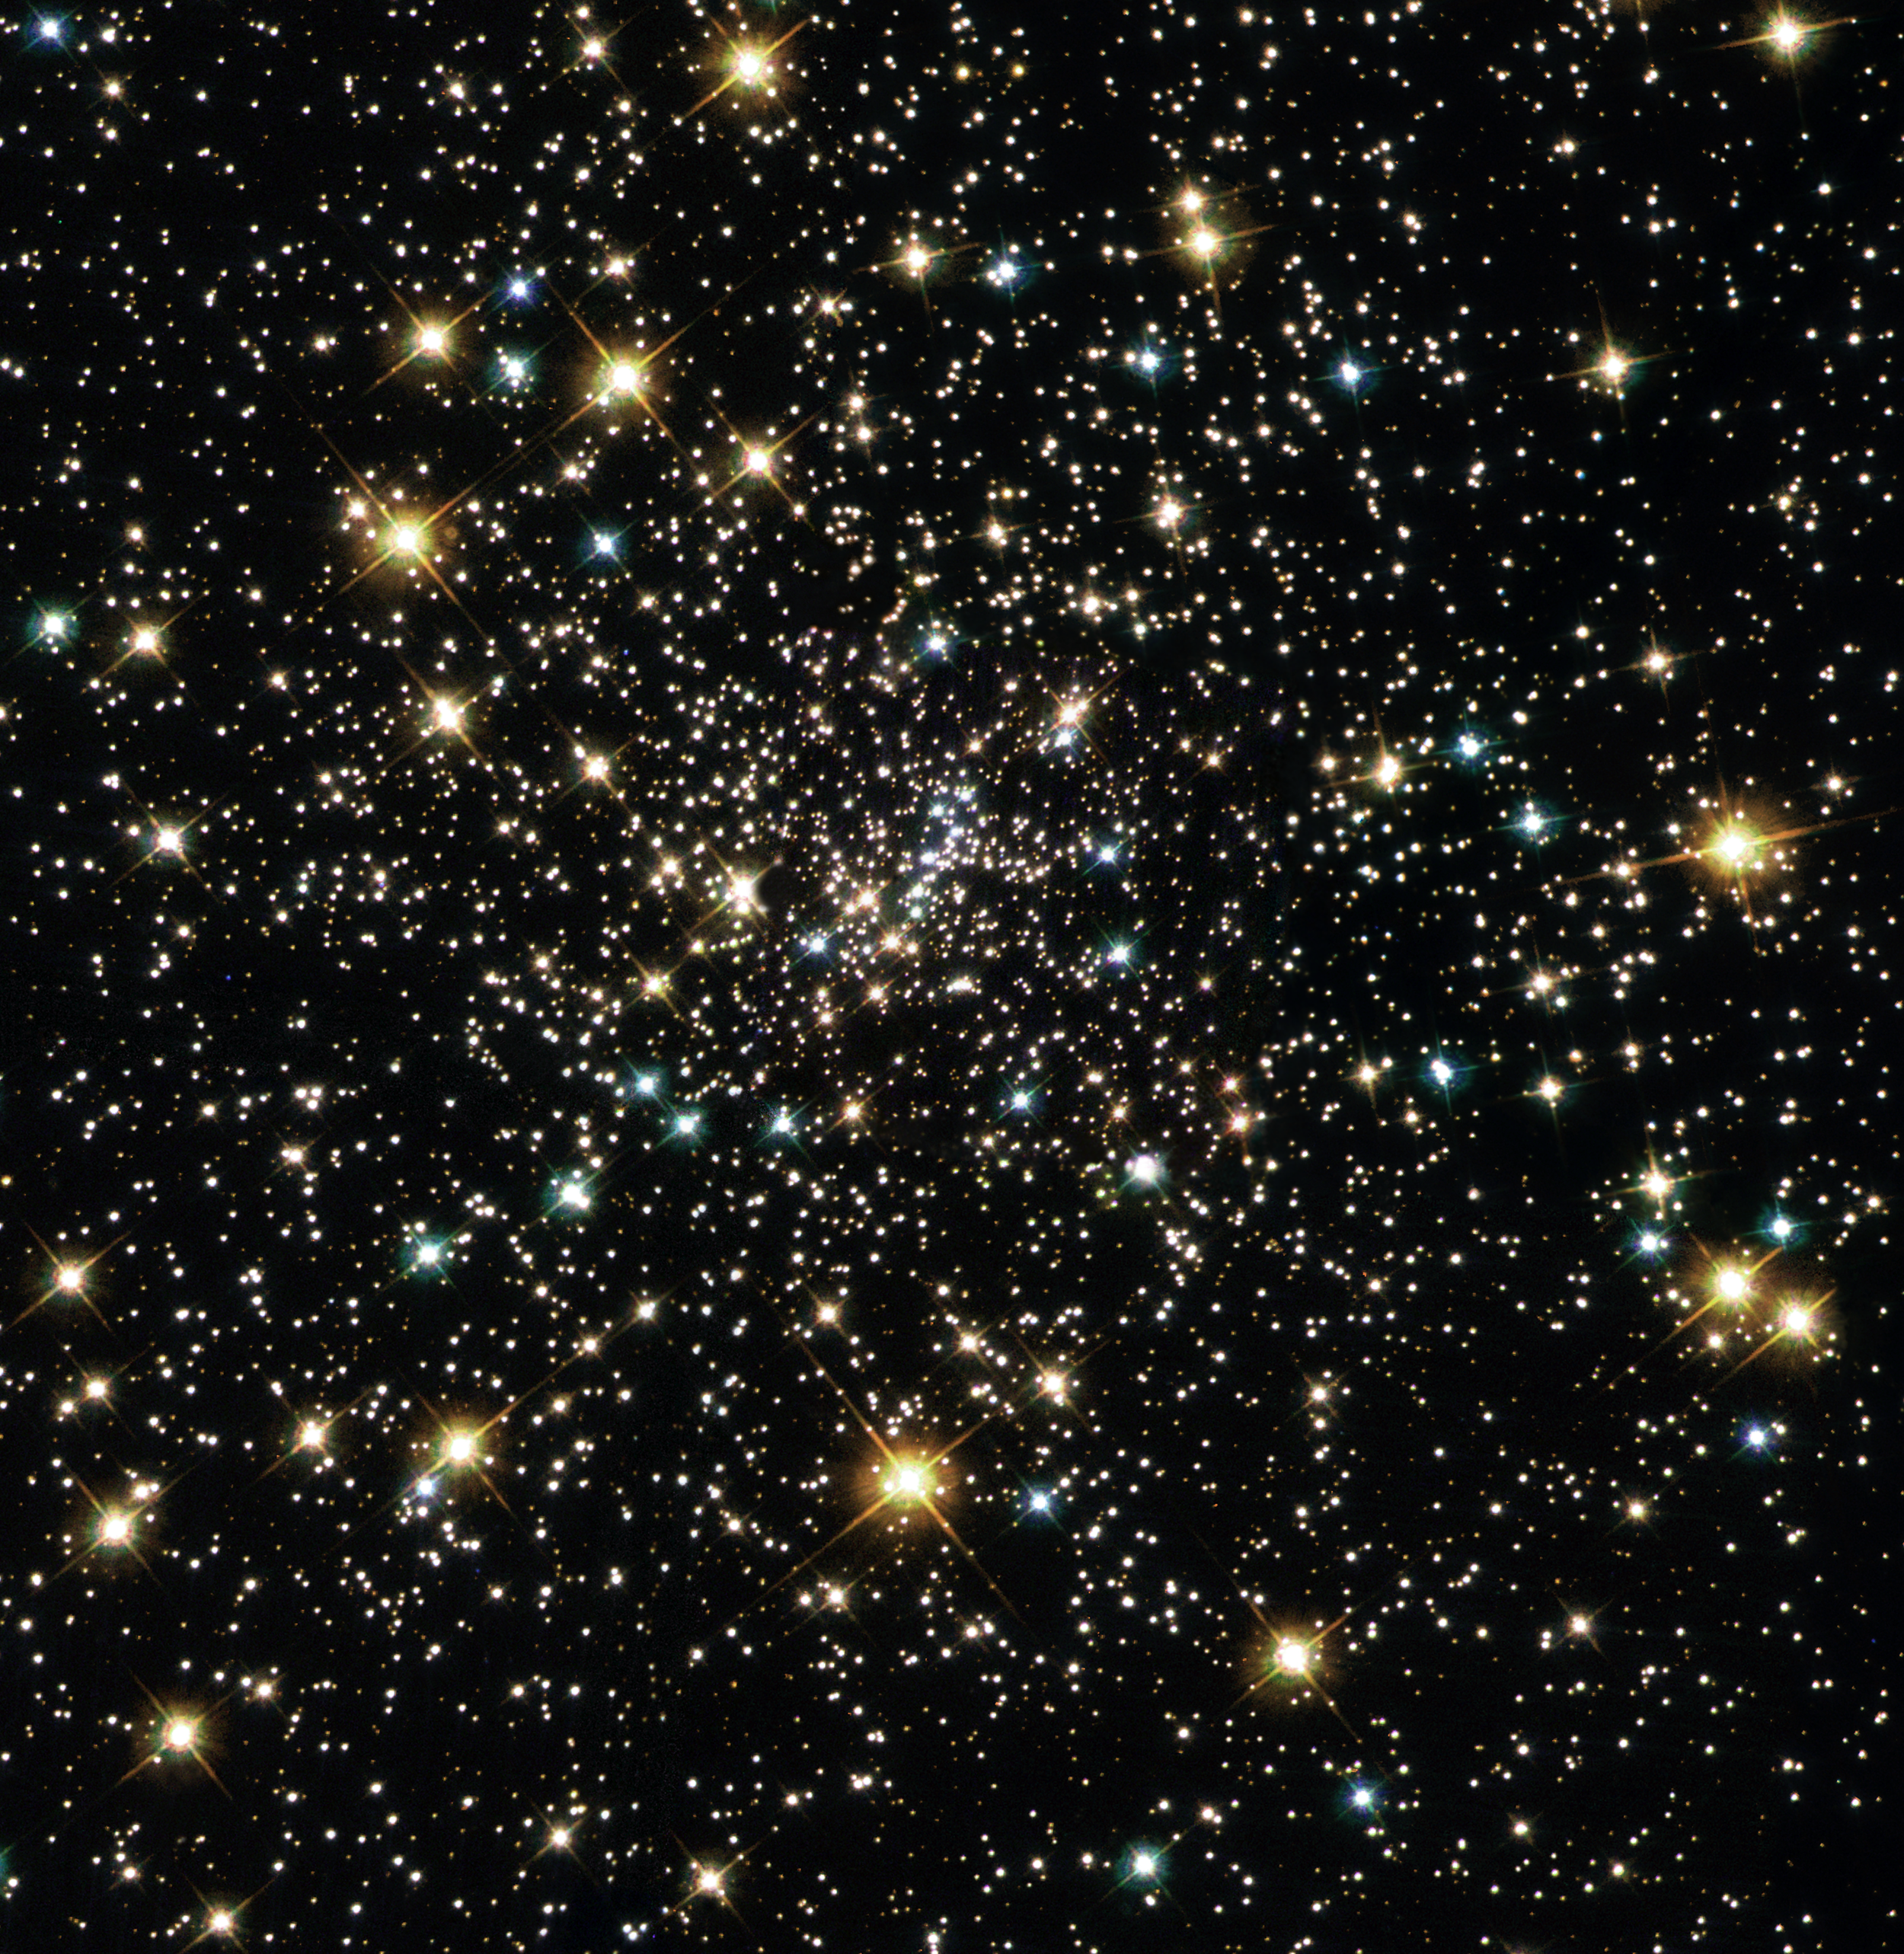

Too Close for Comfort

This Hubble Space Telescope view of the core of one of the nearest globular star clusters, called NGC 6397, resembles a treasure chest of glittering jewels. The cluster is located 8,200 light-years away in the constellation Ara.

Here, the stars are jam-packed together. The stellar density is about a million times greater than in our Sun's stellar neighborhood. The stars are only a few light-weeks apart, while the nearest star to our Sun is over four light-years away.

Credit: NASA/ESA and the Hubble Heritage Team (AURA/STScI)